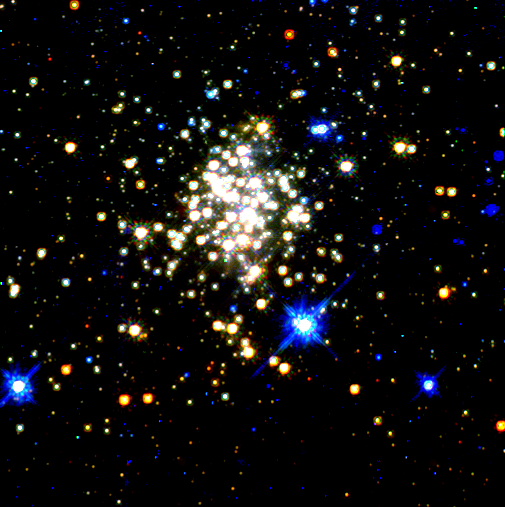

Star clusters near the center of the galaxy

The Arches cluster is so dense that over 100,000 of its stars would fill a spherical region in space whose radius is the distance between the Sun and its nearest neighbor, the star Alpha Centauri, 4.3 light-years away. At least 150 of its stars are among the brightest ever seen in the Galaxy.

Credit: Don Figer ( Space Telescope Science Institute) and NASA/ESA